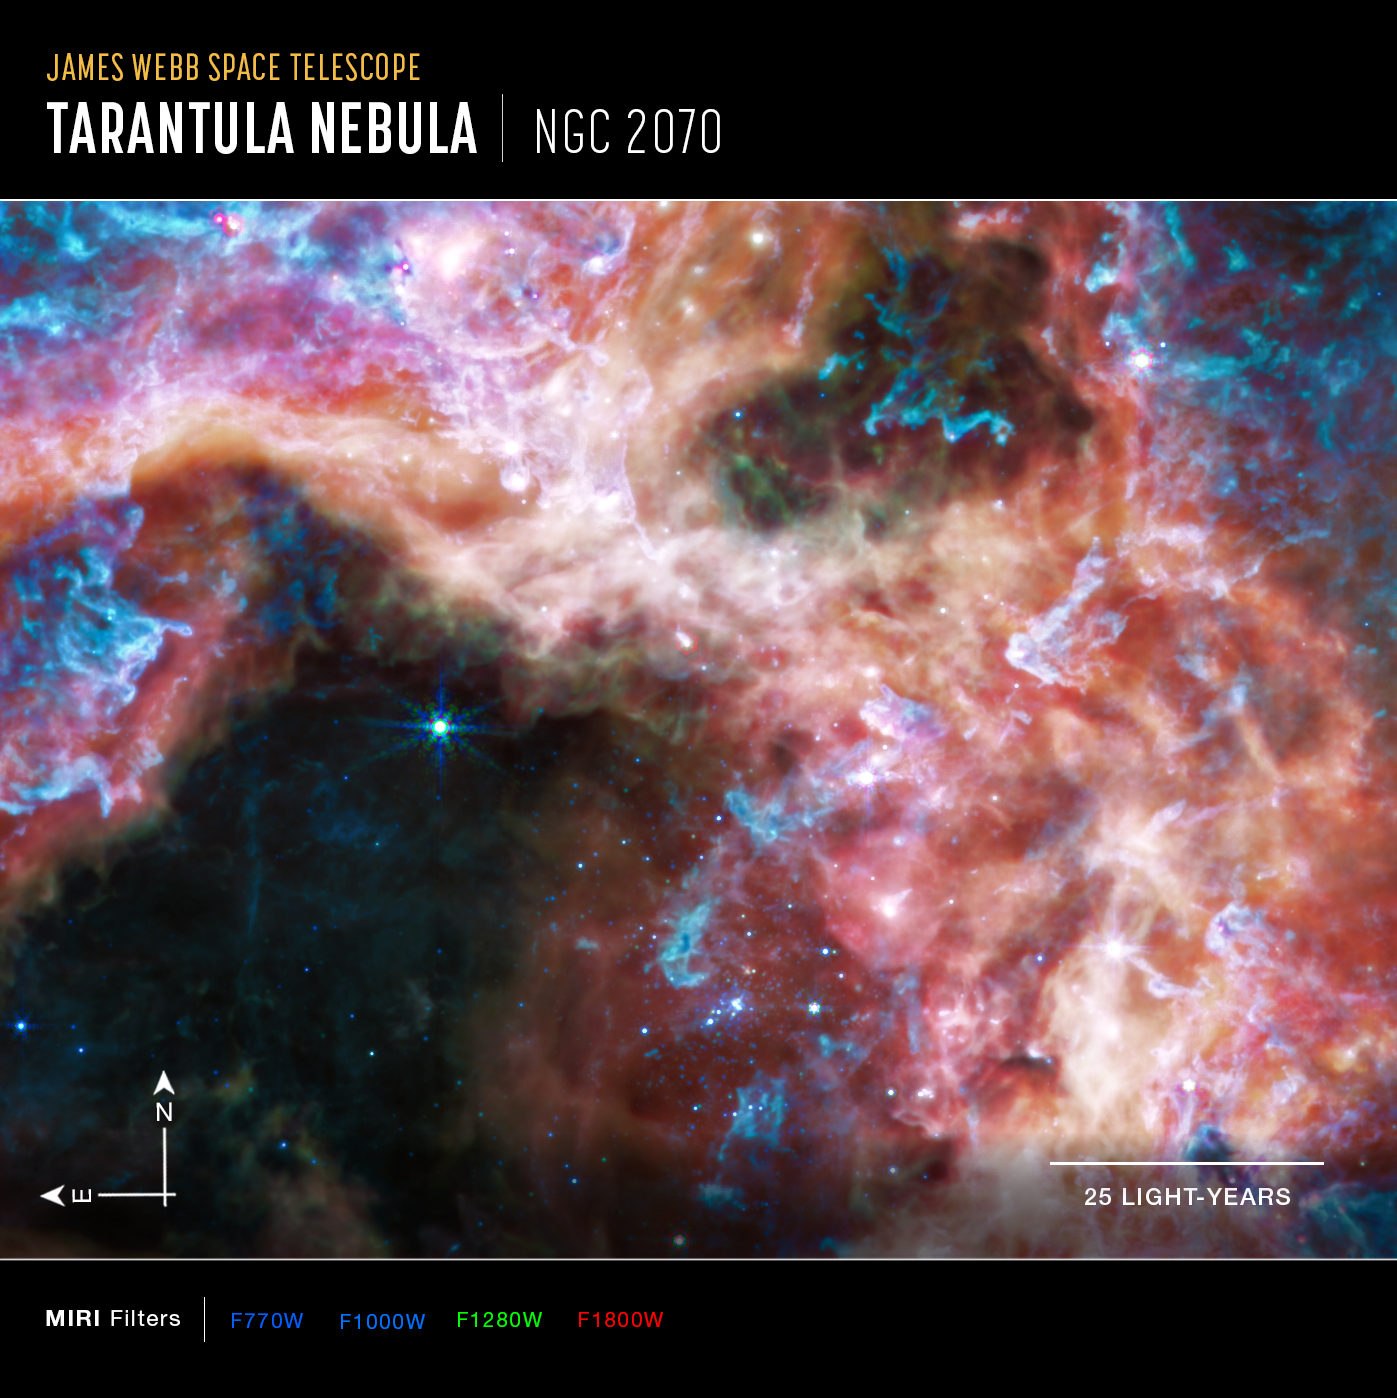

Tarantula Nebula (MIRI Image - Annotated)

At the longer wavelengths of light captured by its Mid-Infrared Instrument (MIRI), Webb focuses on the area surrounding the central star cluster and unveils a very different view of the Tarantula Nebula. In this light, the young hot stars of the cluster fade in brilliance, and glowing gas and dust come forward. Abundant hydrocarbons light up the surfaces of the dust clouds, shown in blue and purple. Much of the nebula takes on a more ghostly, diffuse appearance because mid-infrared light is able to show more of what is happening deeper inside the clouds. Still-embedded protostars pop into view within their dusty cocoons, including a bright group at the very top edge of the image, left of centre.

Other areas appear dark, like in the lower-right corner of the image. This indicates the densest areas of dust in the nebula, that even mid-infrared wavelengths cannot penetrate. These could be the sites of future, or current, star formation.

MIRI was contributed by ESA and NASA, with the instrument designed and built by a consortium of nationally funded European Institutes (The MIRI European Consortium) in partnership with JPL and the University of Arizona.

Credit: NASA, ESA, CSA, and STScI